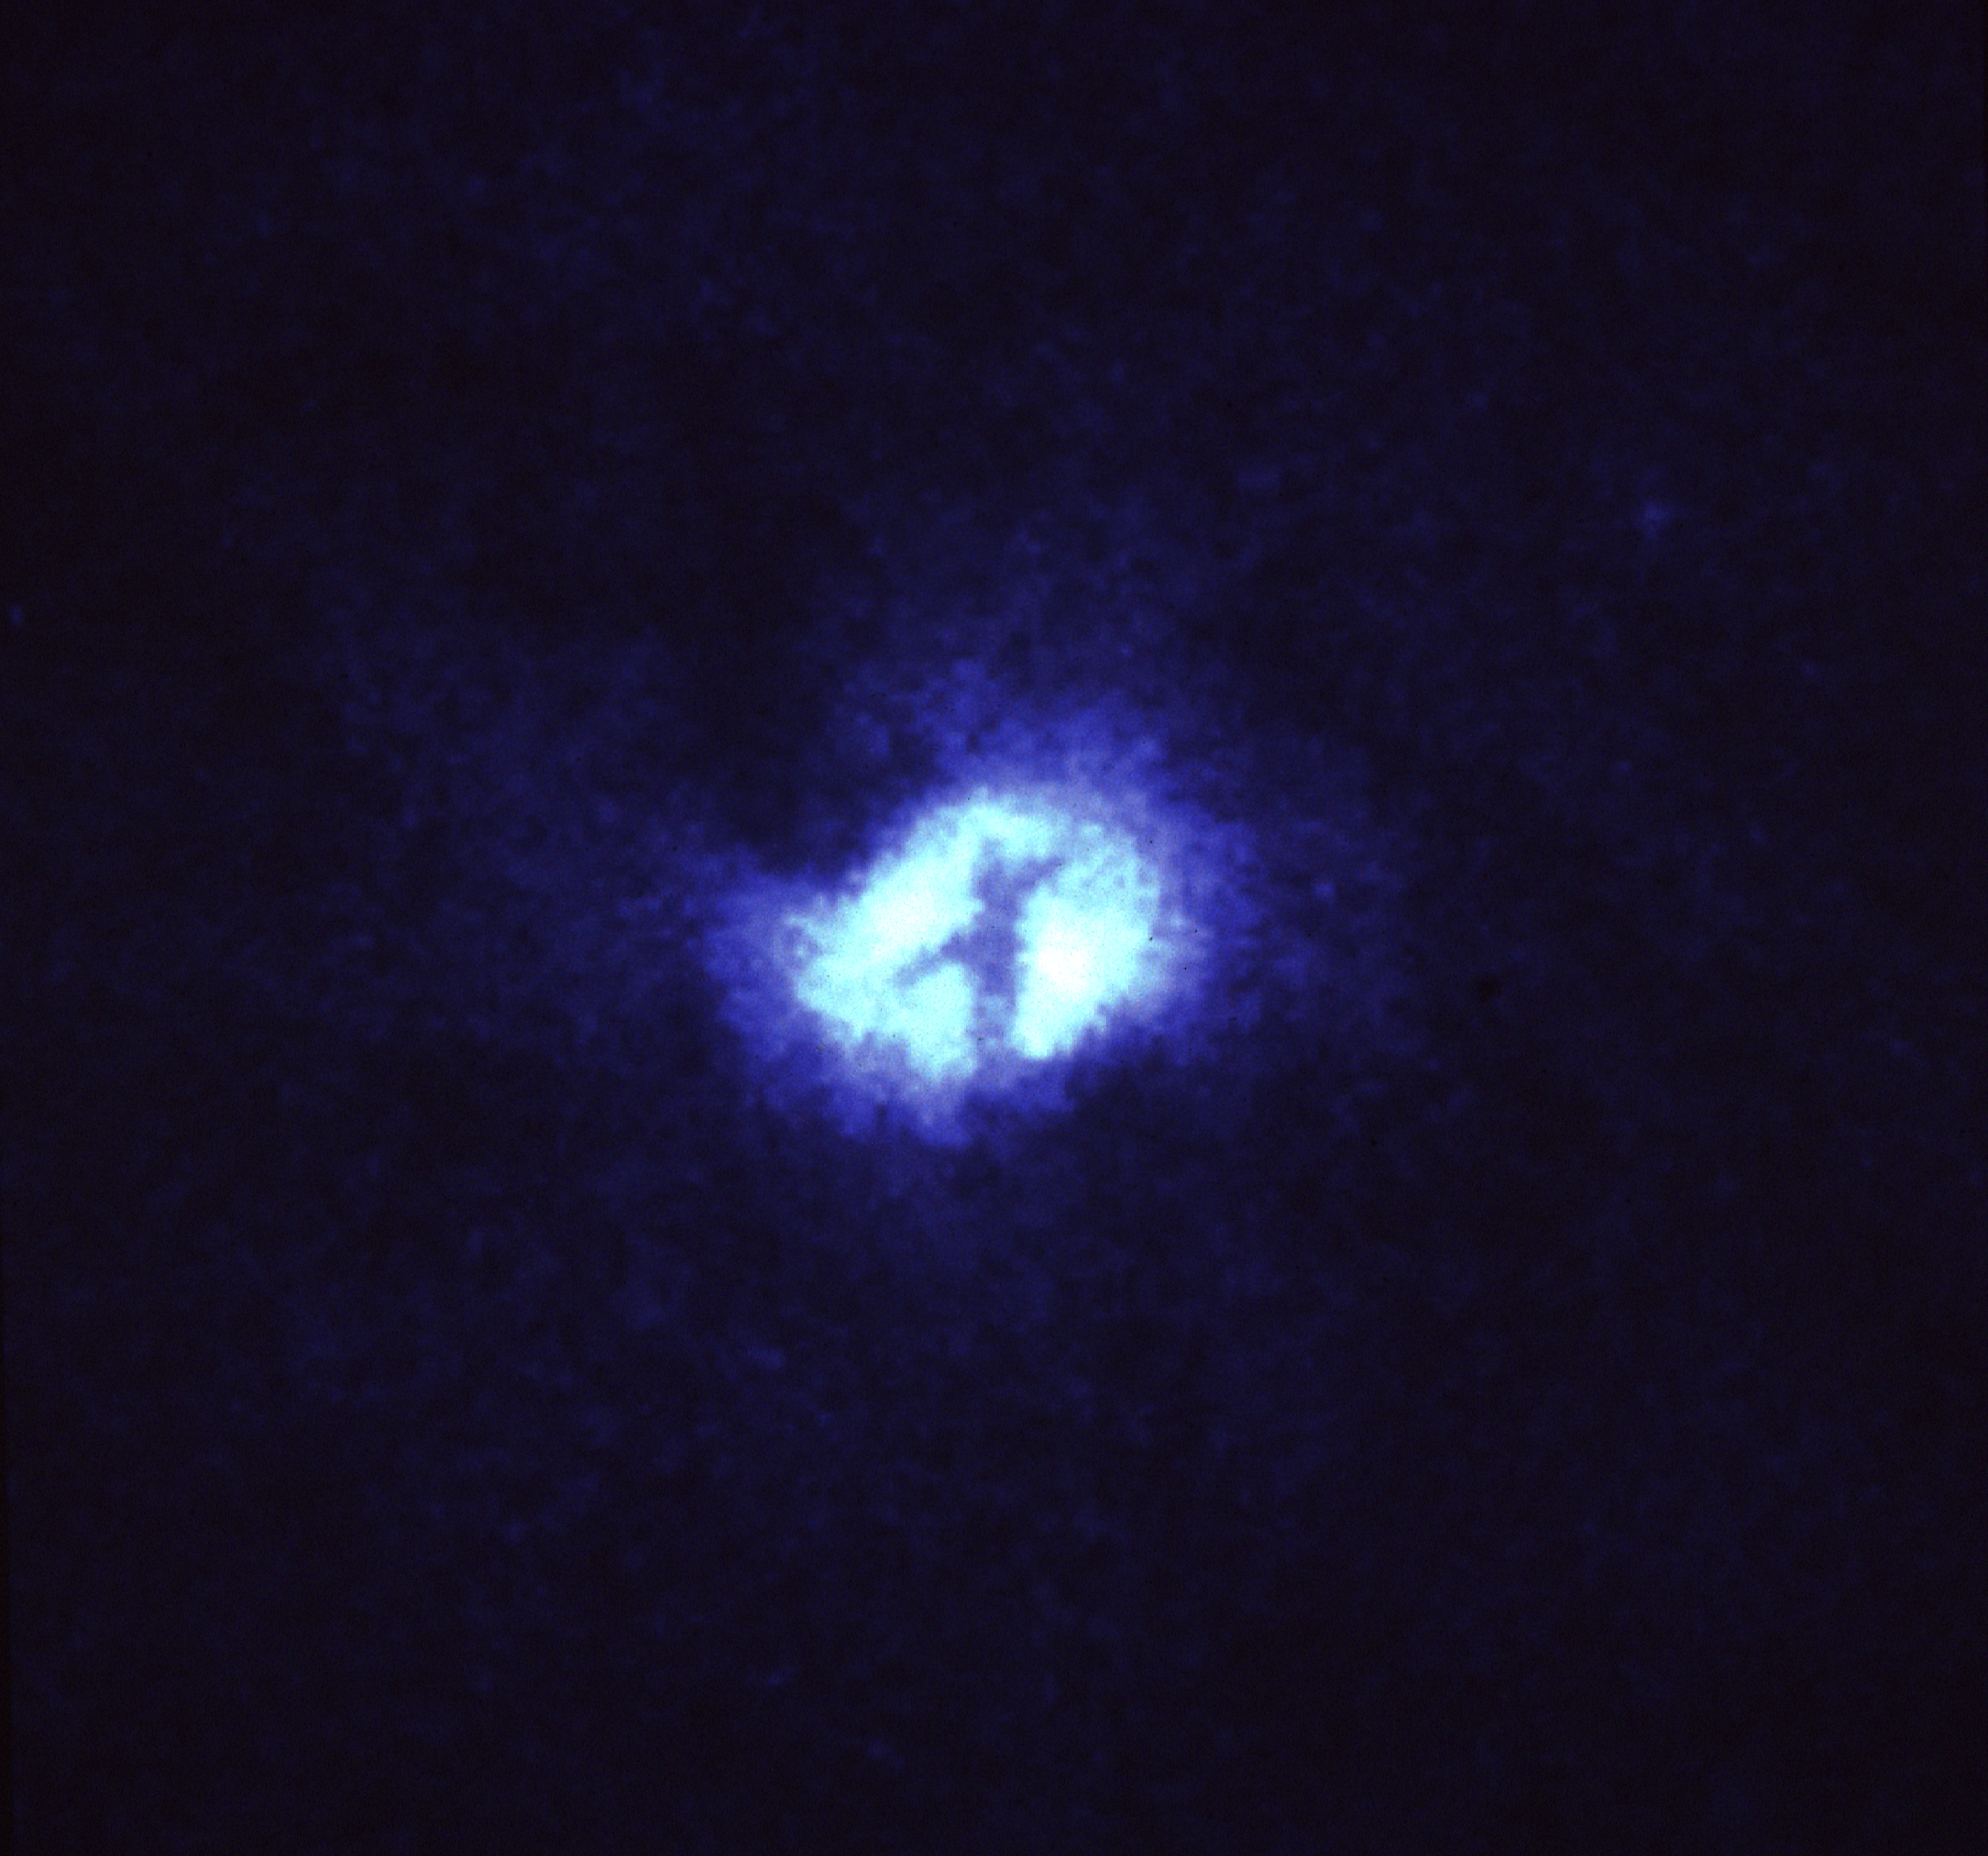

Blue galaxy

NASA/ESA Hubble Space Telescope has provided astronomers with what may be their first direct view of an immense ring of dust which fuels a massive black hole at the heart of the spiral galaxy M51, located 20 million light-years away. Surprisingly, they found that the ring is standing almost perpendicularly to the relatively flat spiral galaxy, like a top spinning on its side with respect to the floor. Even more surprising is the discovery of a secondary ring or dust lane which is contrary to all expectations.

Credit: H. Ford (JHU/STScI), the Faint Object Spectrograph IDT, and NASA/ESA